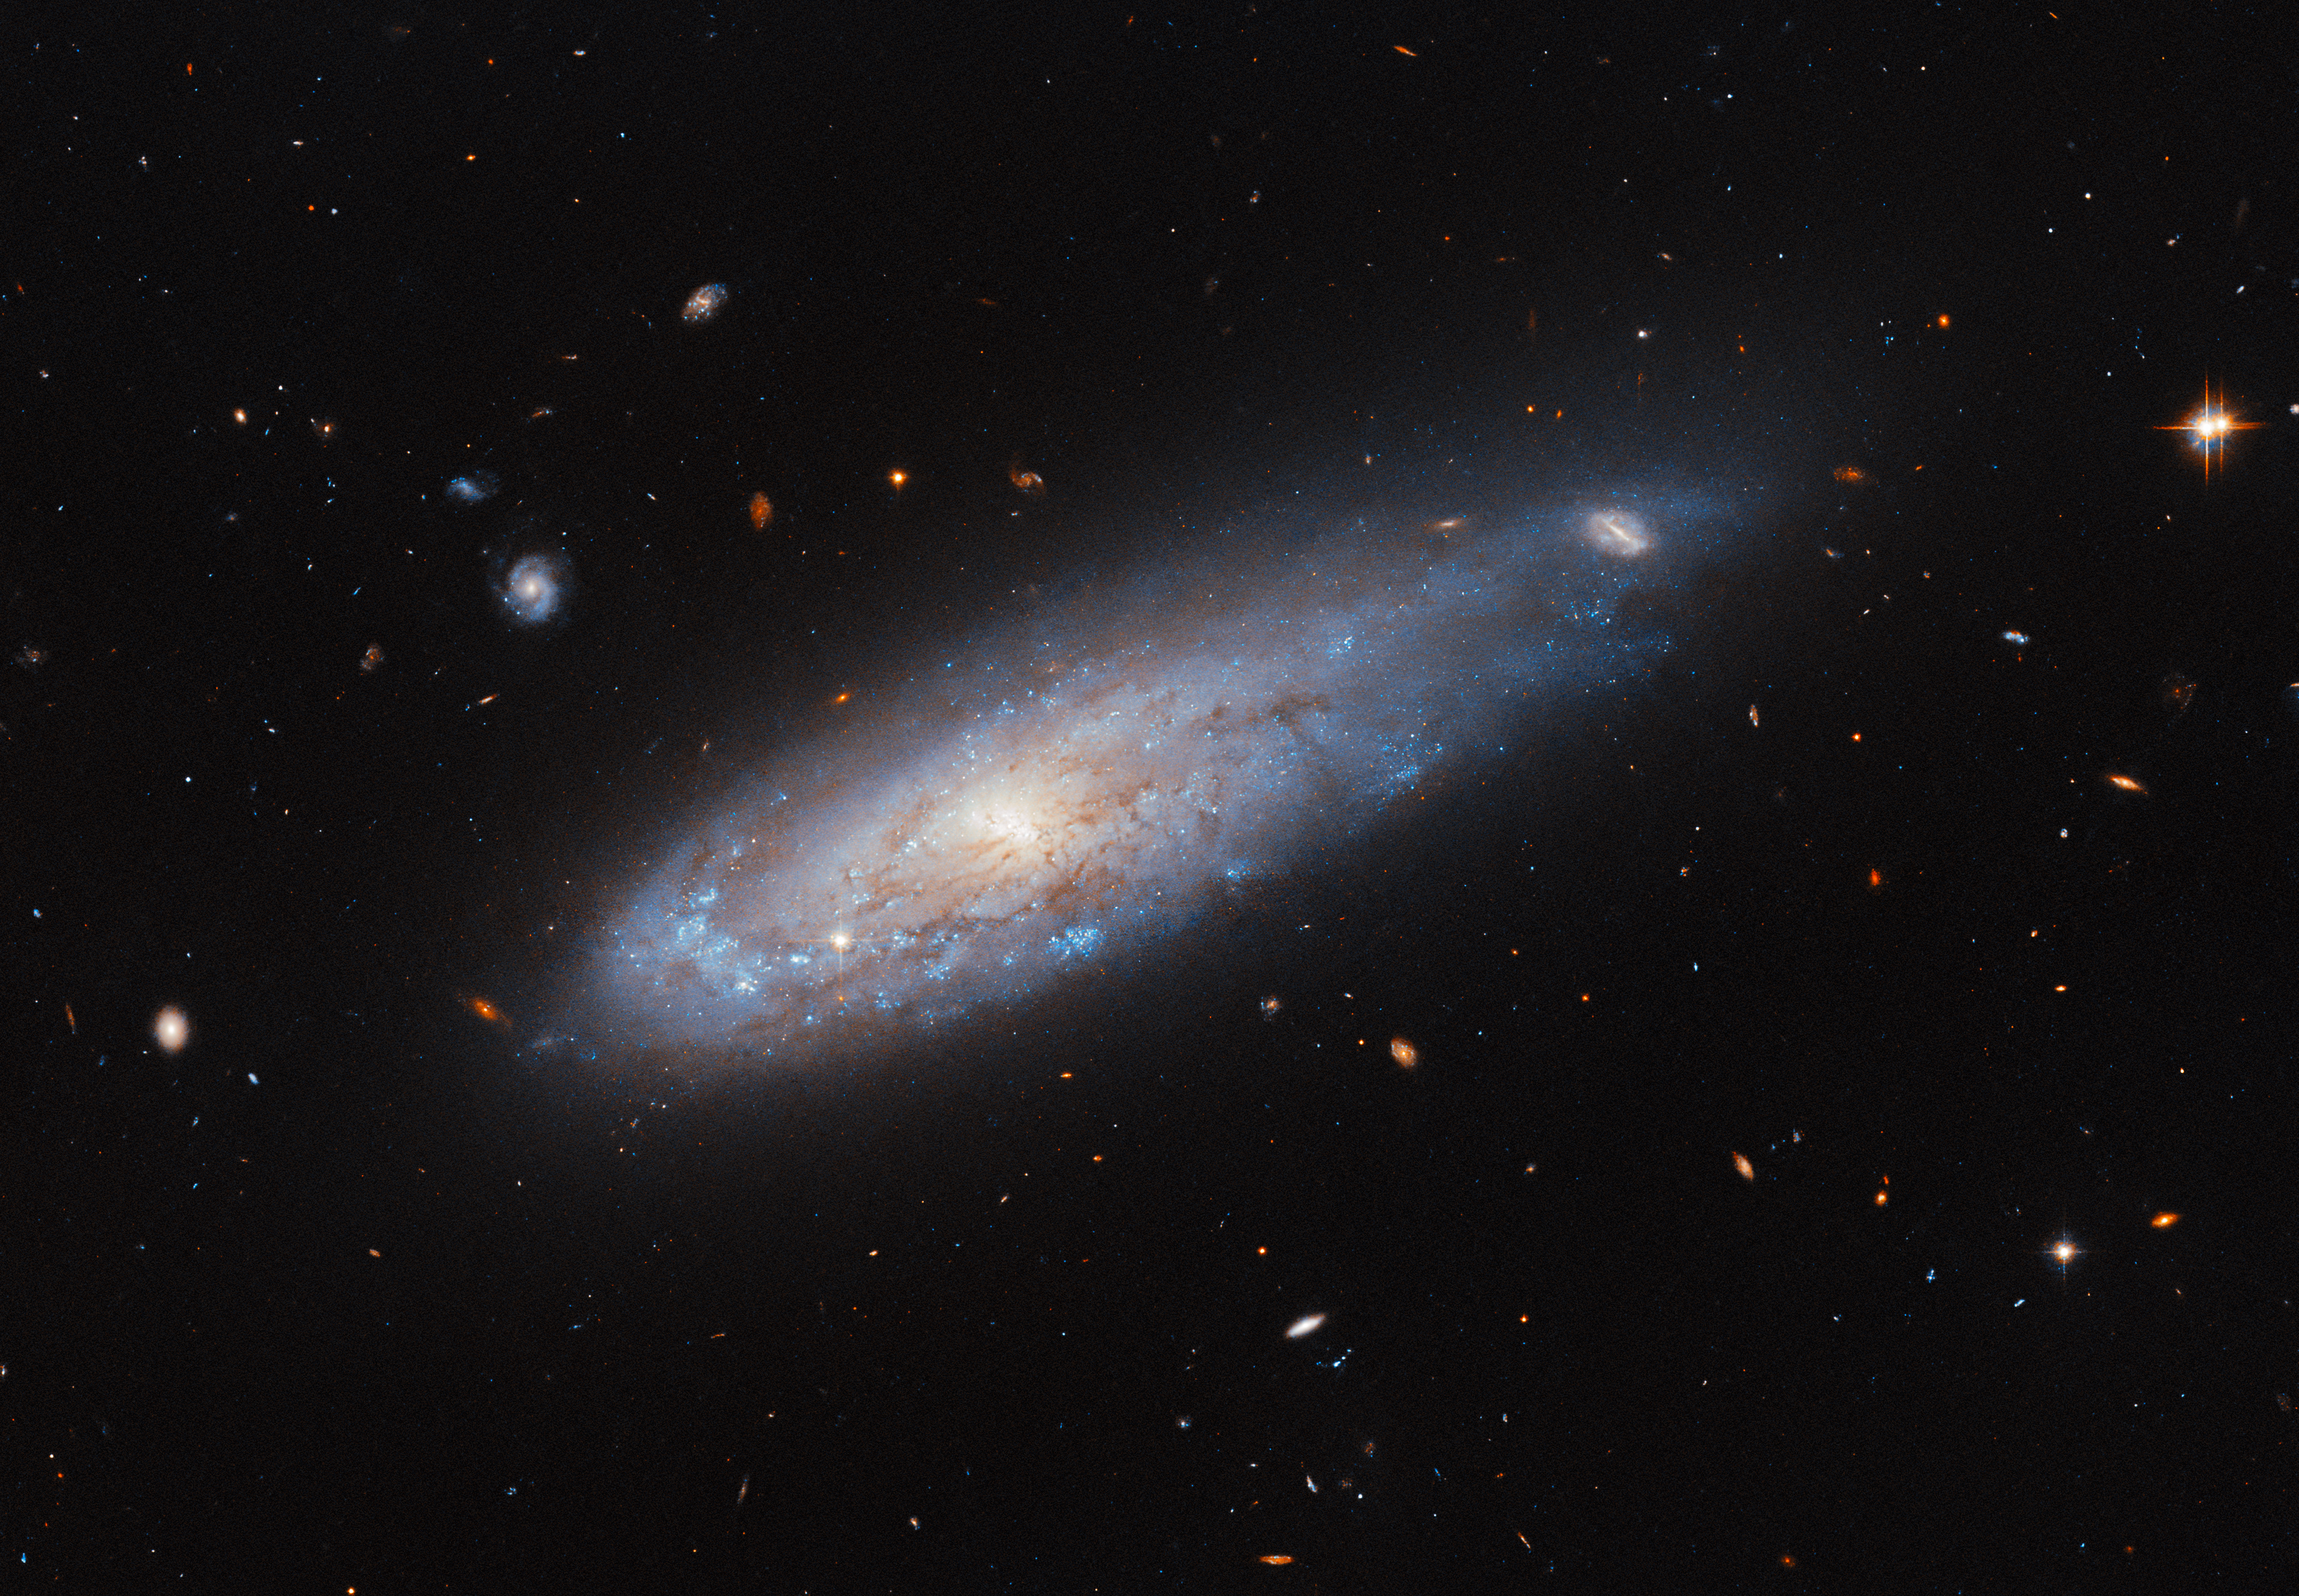

Celestial cannonball

The spiral galaxy appearing in this week’s Hubble Picture of the Week is named IC 3225. It looks remarkably as if it’s been launched from a cannon, speeding through space like a comet with a tail of gas streaming from its disc behind it. The scenes that galaxies appear in from Earth’s point of view are fascinating; many seem to hang calmly in the emptiness of space as if hung from a string, while others star in much more dynamic situations!

Appearances can be deceiving with objects so far from Earth — IC 3225 itself is about 100 million light-years away — but the galaxy’s location suggests some causes for this active scene, because IC 3225 is one of over 1300 members of the Virgo galaxy cluster. The density of galaxies in the Virgo cluster creates a rich field of hot gas between them, the so-called ‘intracluster medium’, while the cluster’s extreme mass has its galaxies careening around its centre in some very fast orbits. Ramming through the thick intracluster medium, especially close to the cluster’s centre, places an enormous ‘ram pressure’ on the moving galaxies that strips gas out of them as they go.

IC 3225 is not so close to the cluster core right now, but astronomers have deduced that it has undergone this ram pressure stripping in the past. The galaxy looks as though it’s been impacted by this: it is compressed on one side and there has been noticeably more star formation on this leading edge, while the opposite end is stretched out of shape. Being in such a crowded field, a close call with another galaxy could also have tugged on IC 3225 and created this shape. The sight of this distorted galaxy is a reminder of the incredible forces at work on astronomical scales, which can move and reshape even entire galaxies!

Credit: ESA/Hubble & NASA, M. Sun